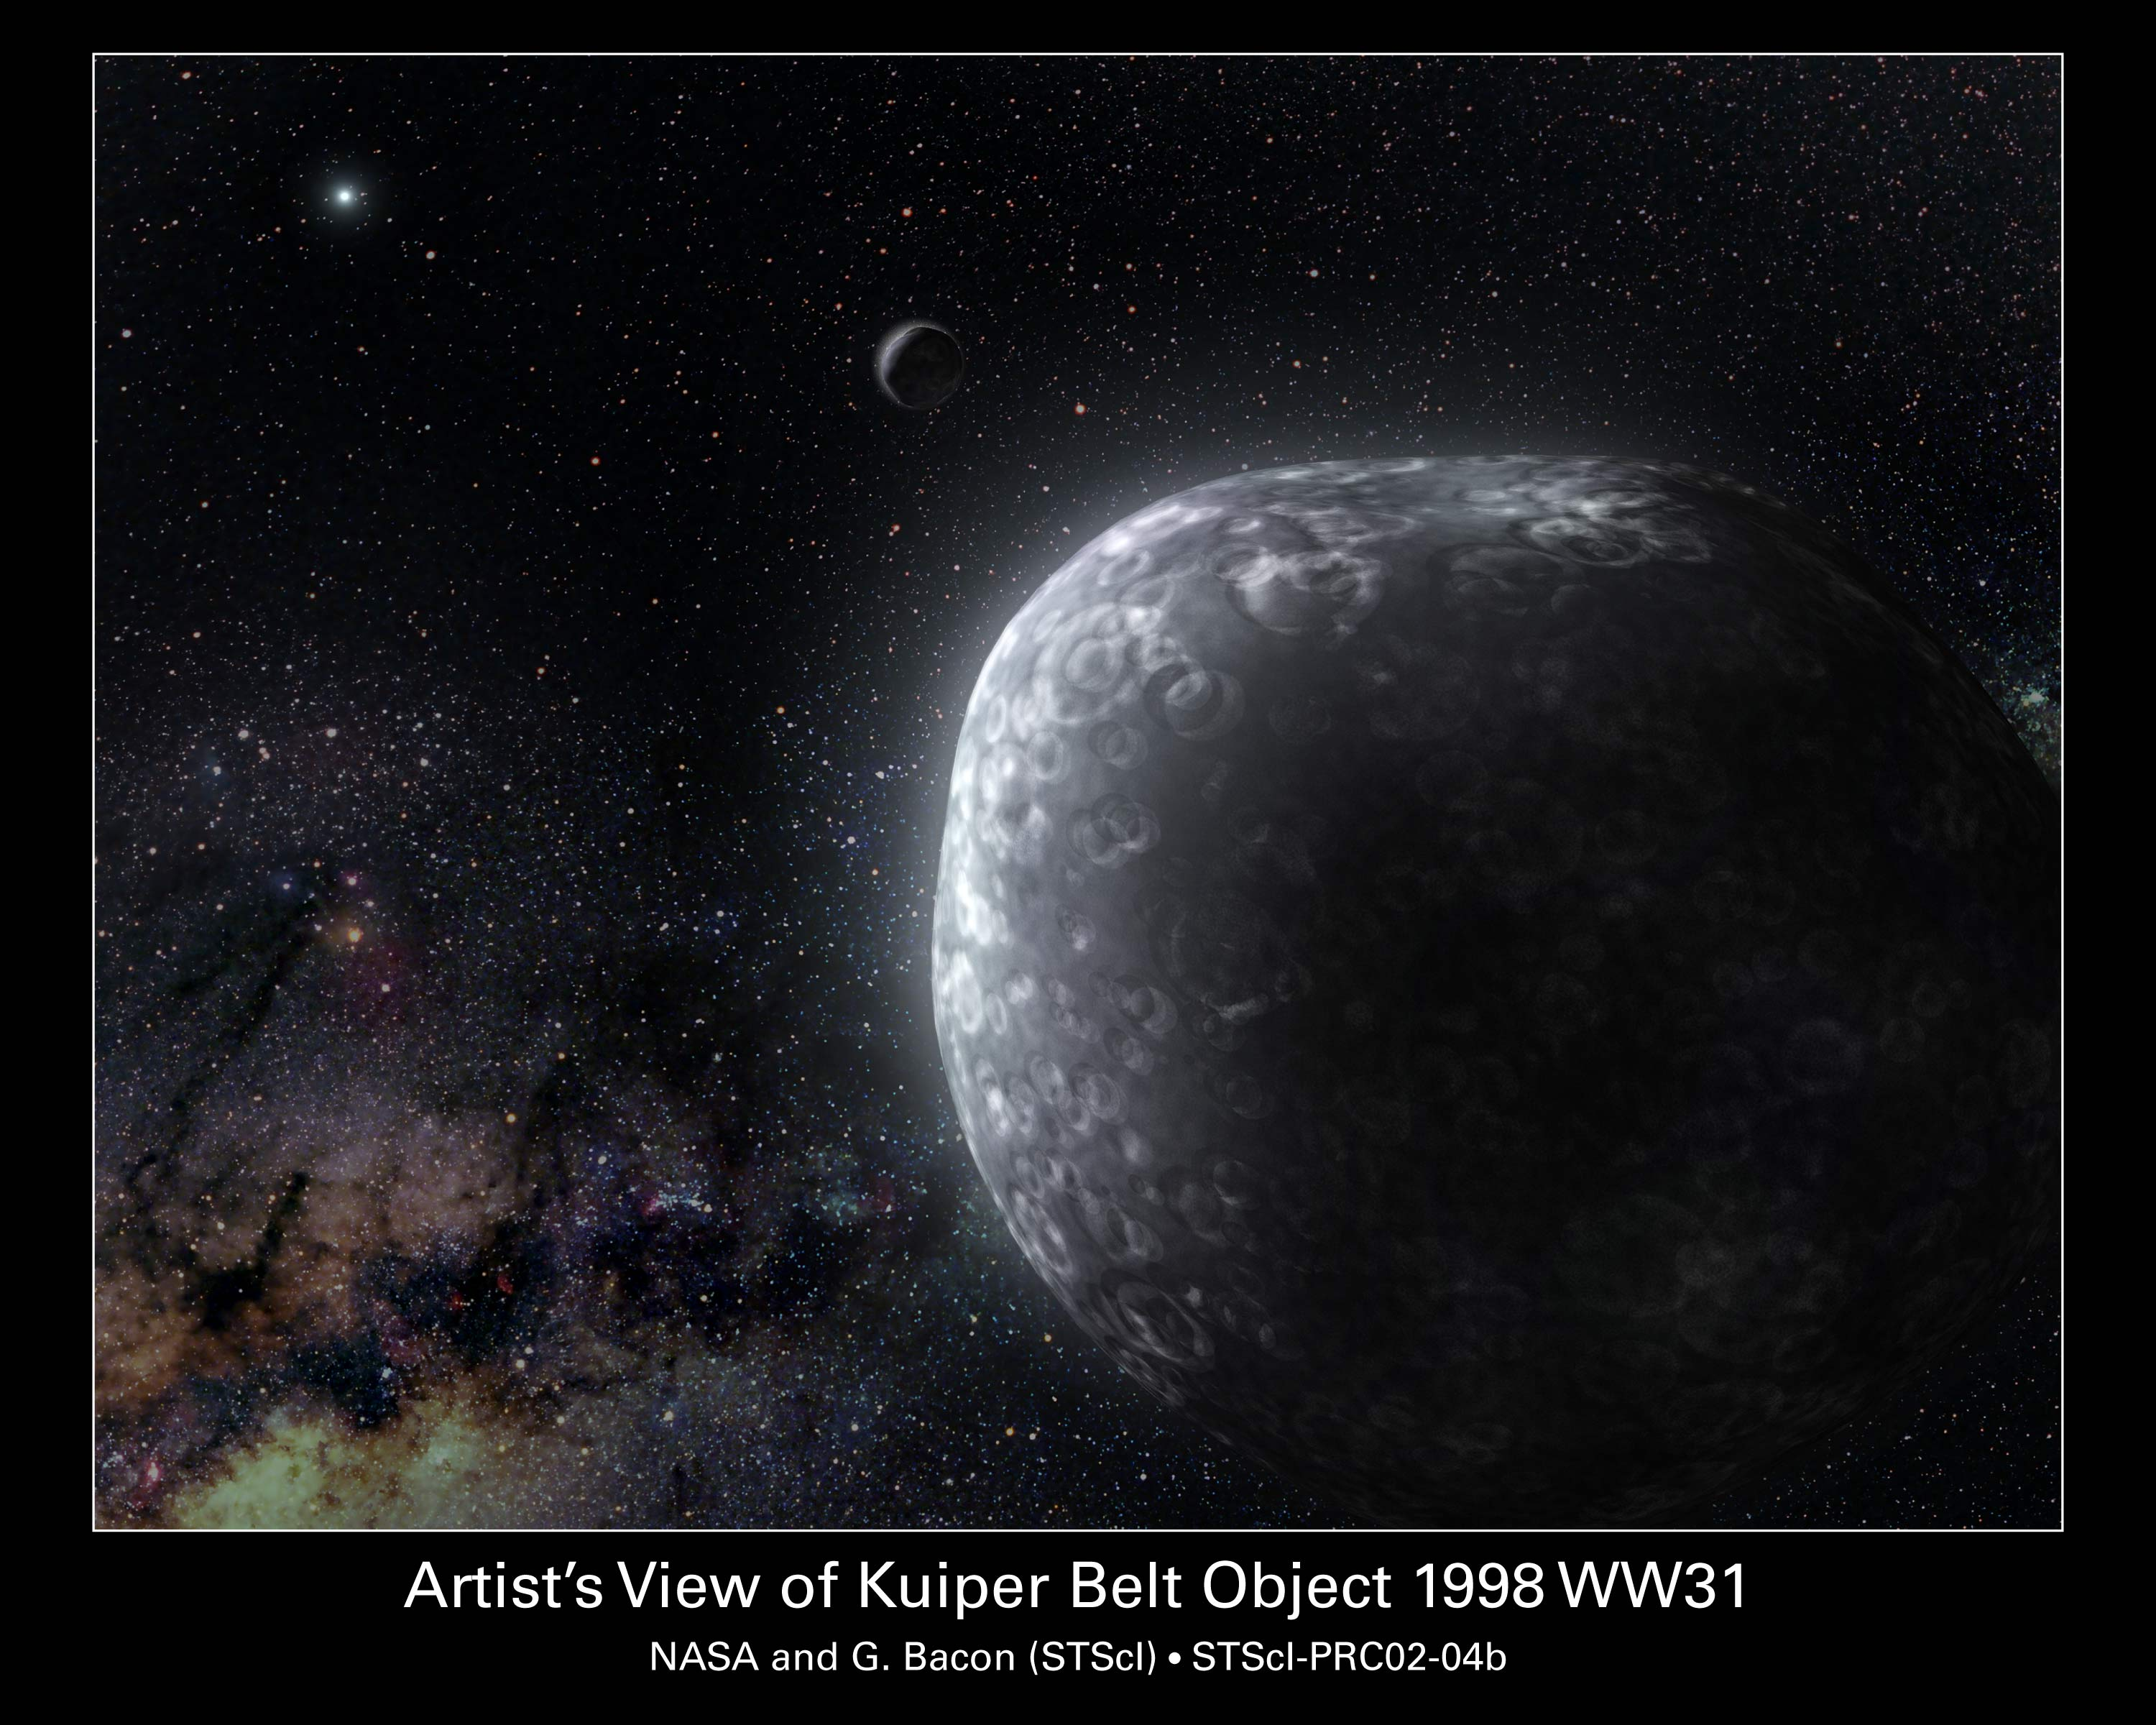

Artist's View of Kuiper Belt Object 1998 WW31

This is an artist's view of a Kuiper Belt binary object, called 1998 WW31. These icy bodies orbit each other at the fringe of our solar system. The illustration depicts one member of the duo in the foreground; its companion - the dark, round object - is in the background. The objects are about the same size. Both are illuminated from behind by the Sun [the white dot at upper left]. Like other Kuiper Belt objects, this duo orbits the Sun, completing a circuit every 301 years. The planet Pluto orbits the Sun every 248 years.

Credit: NASA/ESA and G. Bacon ( Space Telescope Science Institute)